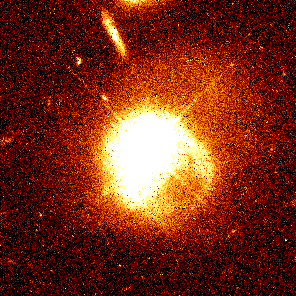

Quasar PKS 2349

This image reveals the huge, thin tidal arms of a galaxy associated with the luminous quasar, which is 1.5 billion light-years from Earth.

The odd-shaped arms suggest an encounter between the quasar and a companion galaxy. The thick bright line above the quasar is an edge-on background galaxy.

Credit: John Bahcall (Institute for Advanced Study, Princeton) Mike Disney (University of Wales) and NASA/ESA